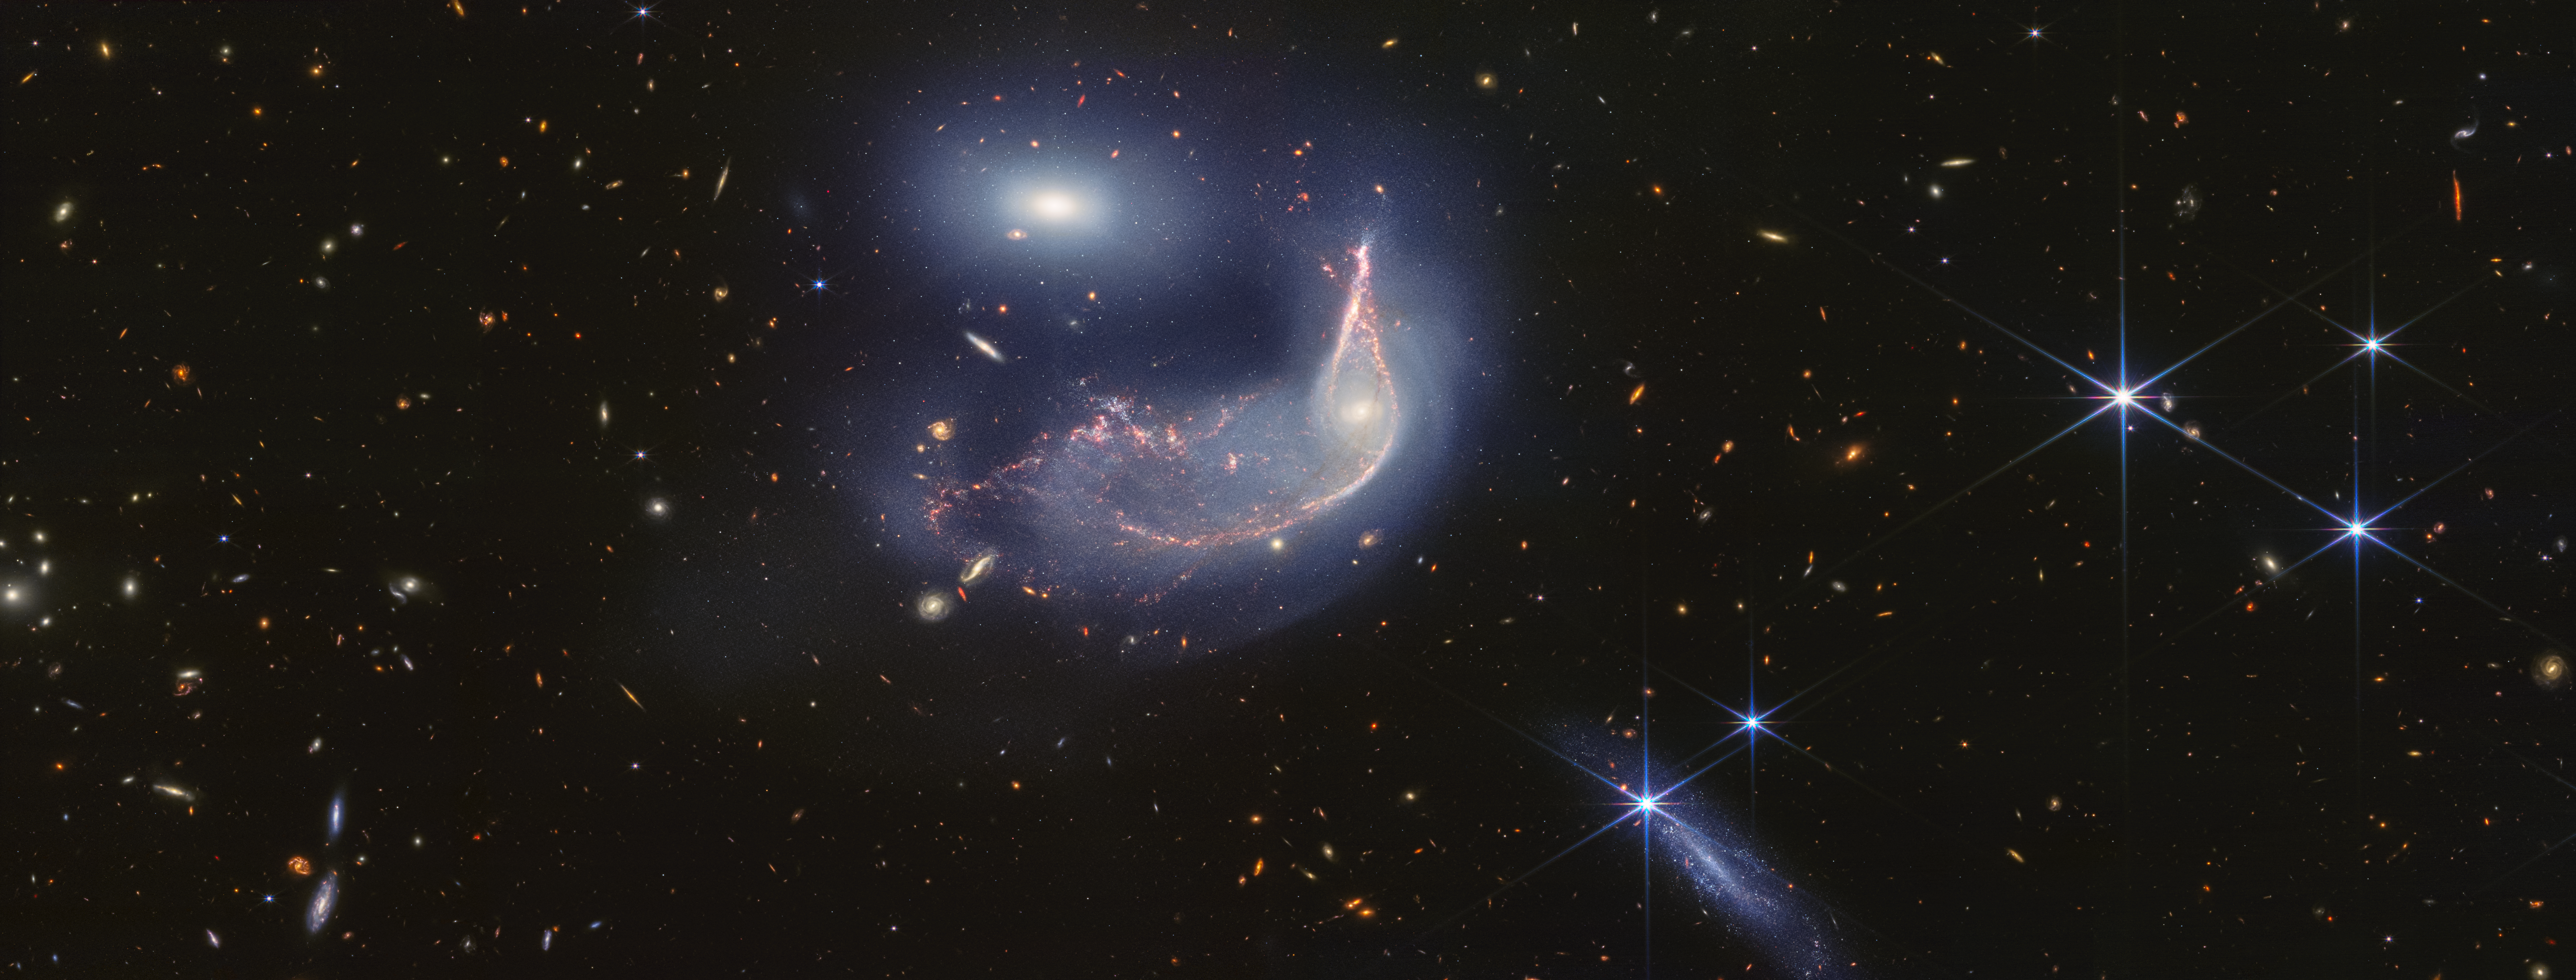

Interacting galaxies Arp 142 (NIRCam image, rotated full-field)

The distorted spiral galaxy, the Penguin, and the compact elliptical galaxy, the Egg, are locked in an active embrace. A new near- and mid-infrared image from the James Webb Space Telescope, taken to mark its second year of science, shows that their interaction is marked by a faint upside-down U-shaped blue glow.

The pair, known jointly as Arp 142, made their first pass between 25 and 75 million years ago — causing ‘fireworks’, or new star formation, in the Penguin. In the most extreme cases, mergers can cause galaxies to form thousands of new stars per year for a few million years. For the Penguin, research has shown that about 100 to 200 stars have formed per year. By comparison, our Milky Way galaxy (which is not interacting with a galaxy of the same size) forms roughly six to seven new stars per year.

This gravitational shimmy also remade the Penguin’s appearance. Its coiled spiral arms unwound, and gas and dust were pulled in an array of directions, like it was releasing confetti. It is rare for individual stars to collide when galaxies interact (space is vast), but the galaxies’ mingling disrupts their stars’ orbits.

Today, the Penguin’s galactic centre looks like an eye set within a head, and the galaxy has prominent star trails that take the shape of a beak, backbone, and fanned-out tail. A faint, but prominent dust lane extends from its beak down to its tail.

Despite the Penguin appearing far larger than the Egg, these galaxies have approximately the same mass. This is one reason why the smaller-looking Egg hasn’t yet merged with the Penguin. (If one was less massive, it may have merged earlier.)

The oval Egg is filled with old stars, and little gas and dust, which is why it isn’t sending out ‘streamers’ or tidal tails of its own and instead has maintained a compact oval shape. If you look closely, the Egg has four prominent diffraction spikes — the galaxy’s stars are so concentrated that it gleams.

The background of this image is overflowing with far more distant galaxies. This is a testament to the sensitivity and resolution of Webb’s infrared cameras.

Arp 142 lies 326 million light-years from Earth in the constellation Hydra.

Credit: NASA, ESA, CSA, STScI